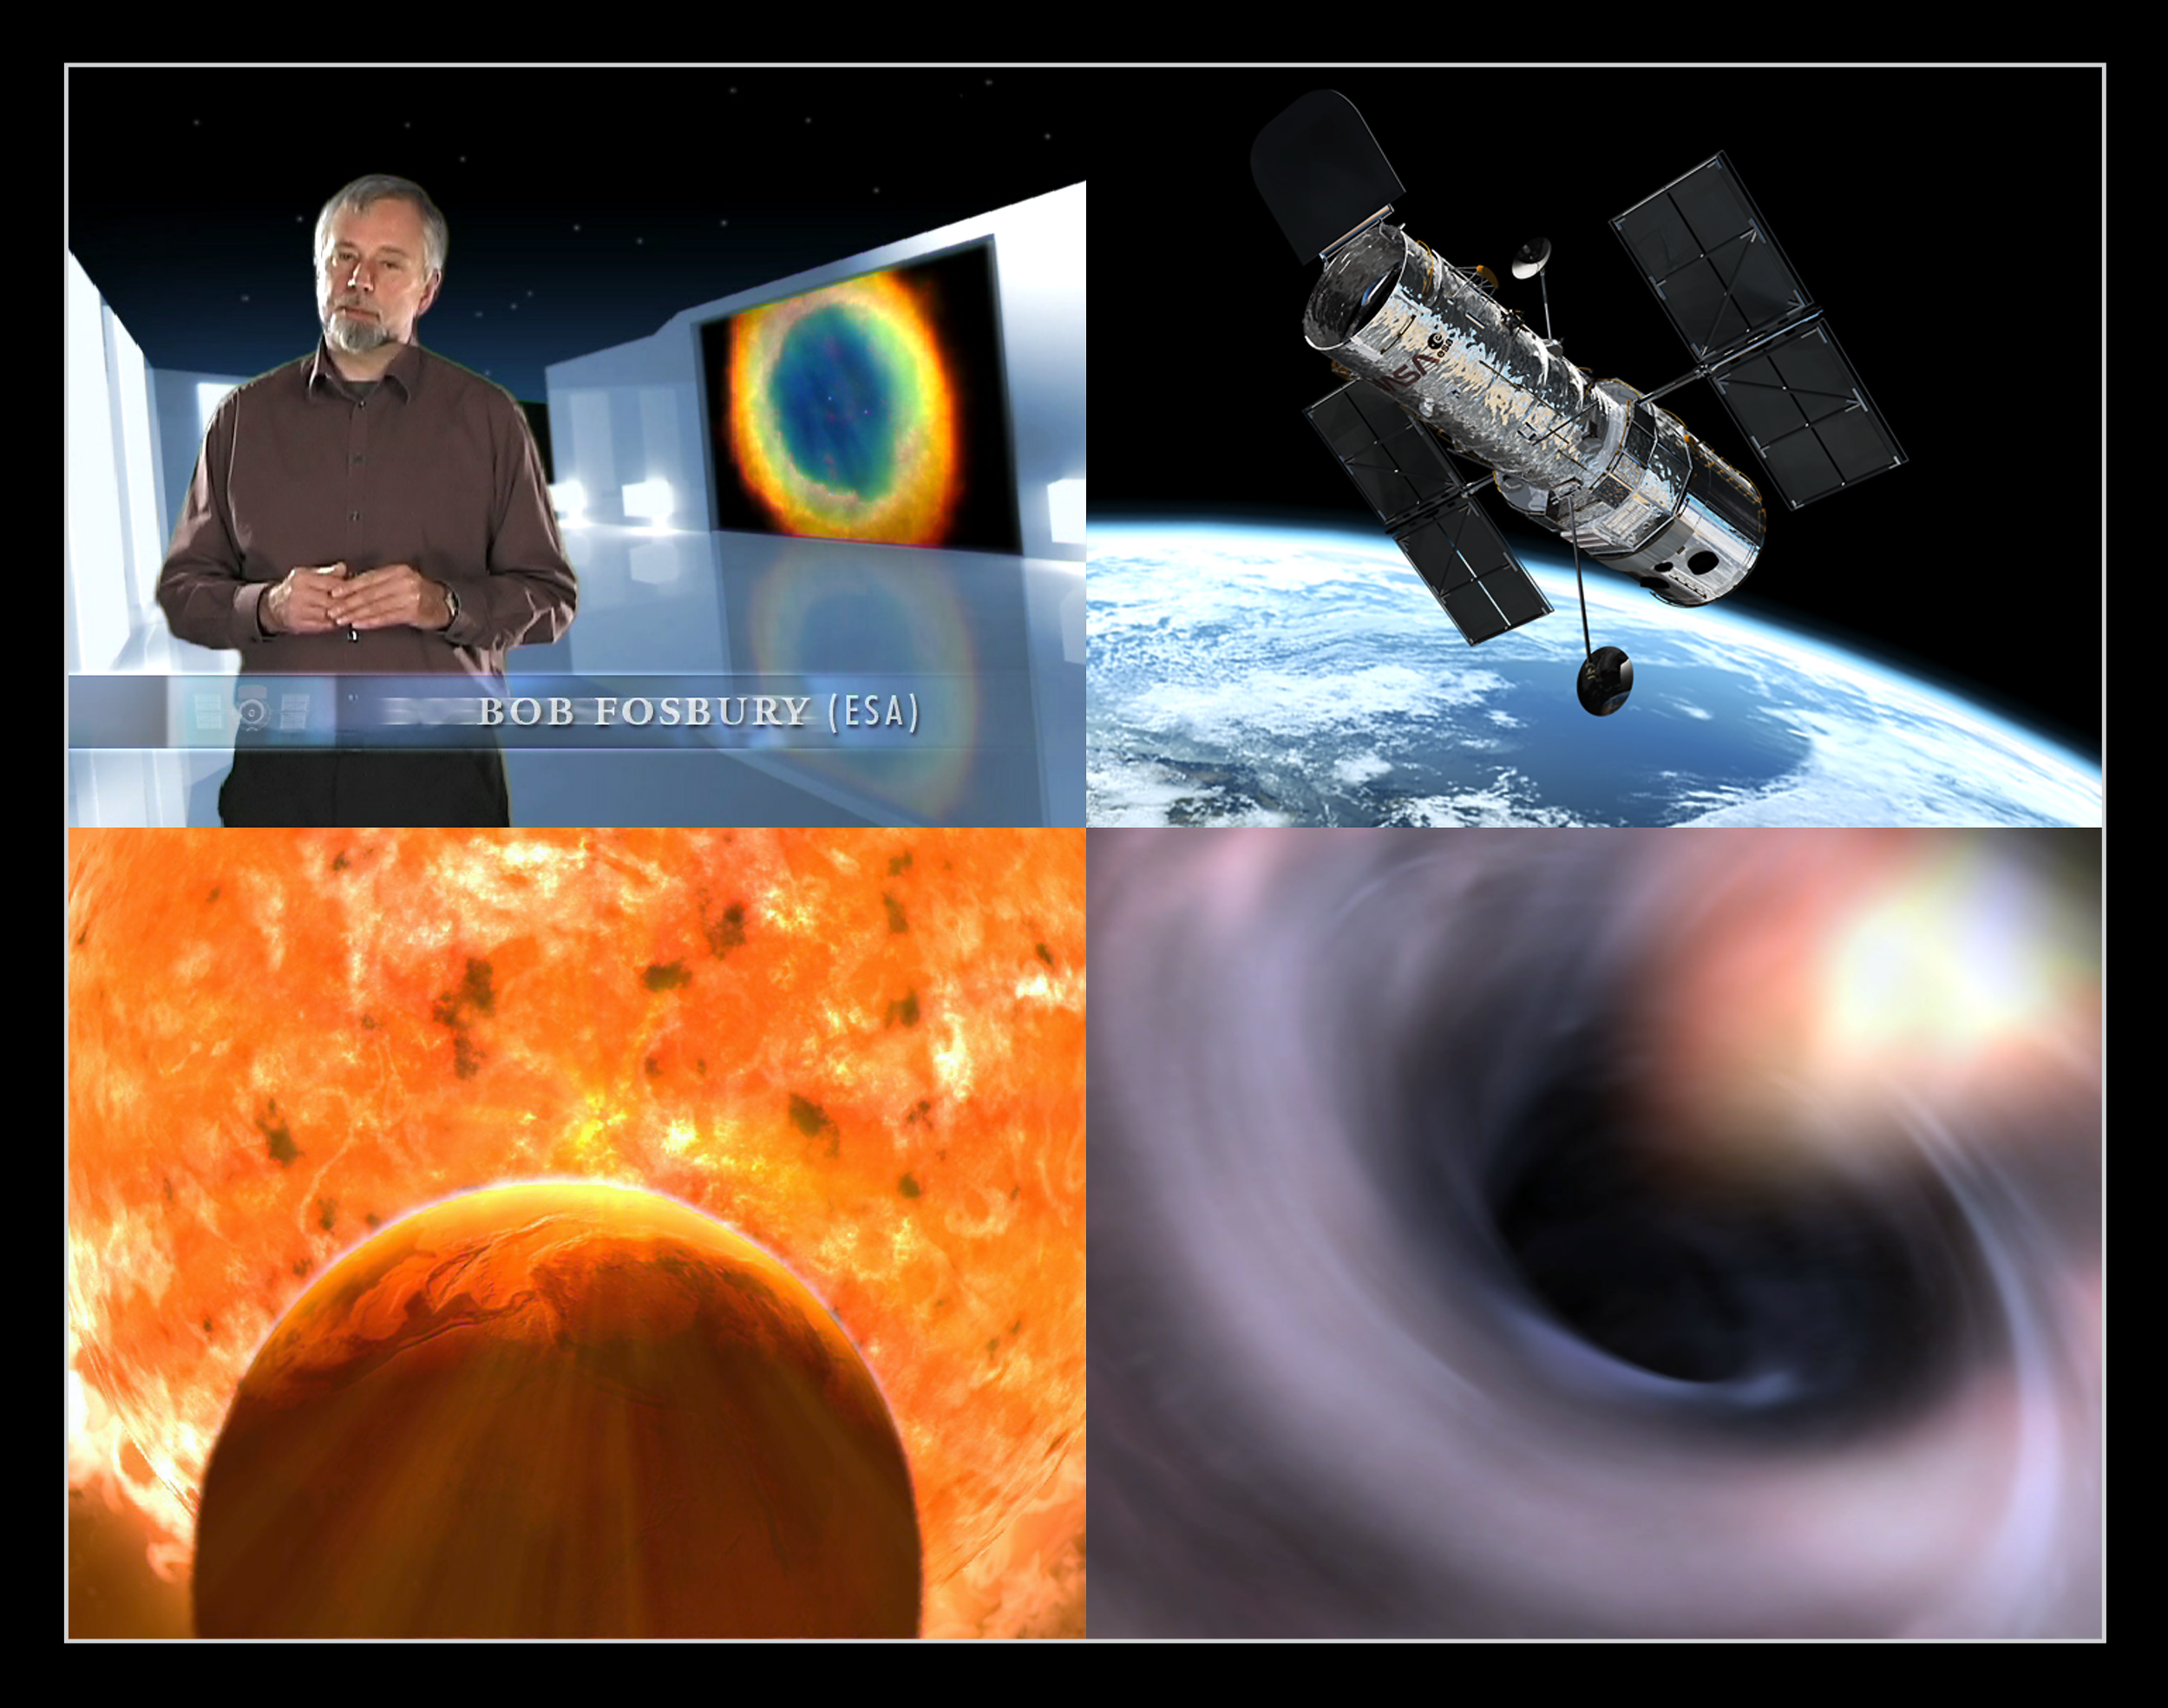

Screenshots from ESA's anniversary movie

ESA's anniversary DVD film "Hubble - 15 years of discovery" covers all aspects of the Hubble Space Telescope project - a journey through the history, the troubled early life and the ultimate scientific successes of Hubble. This portrait, directed by Lars Lindberg Christensen, contains large amounts of previously unpublished footage of superb quality. With more than 500,000 copies distributed, this DVD movie is probably the most widely available science documentary ever.

Hubble's spectacular visual images make a stunning backdrop throughout the film, bringing an immediacy and vitality as the narrative reveals the new insights Hubble has inspired in all fields of astronomy from extrasolar planets to black holes. Complex though the science behind the Telescope's images often is, Art Director Martin Kornmesser has developed a unique style of elaborate 3D animation - some of which are seen in these screenshots - that enhances and vividly clarifies the underlying science.

The movie is presented by an ESA scientist, Dr. Robert (Bob) Fosbury, who has himself used Hubble for his own research on many occasions.

The 83-minute film DVD contains more than 60 minutes of bonus material and has narration in three languages: English, German and Greek. In addition, there are subtitles in 15 languages: Bulgarian, Danish, English, German, Greek, Spanish, French, Italian, Dutch, Norwegian, Polish, Portuguese, Russian, Finnish and Swedish.

Credit: ESA